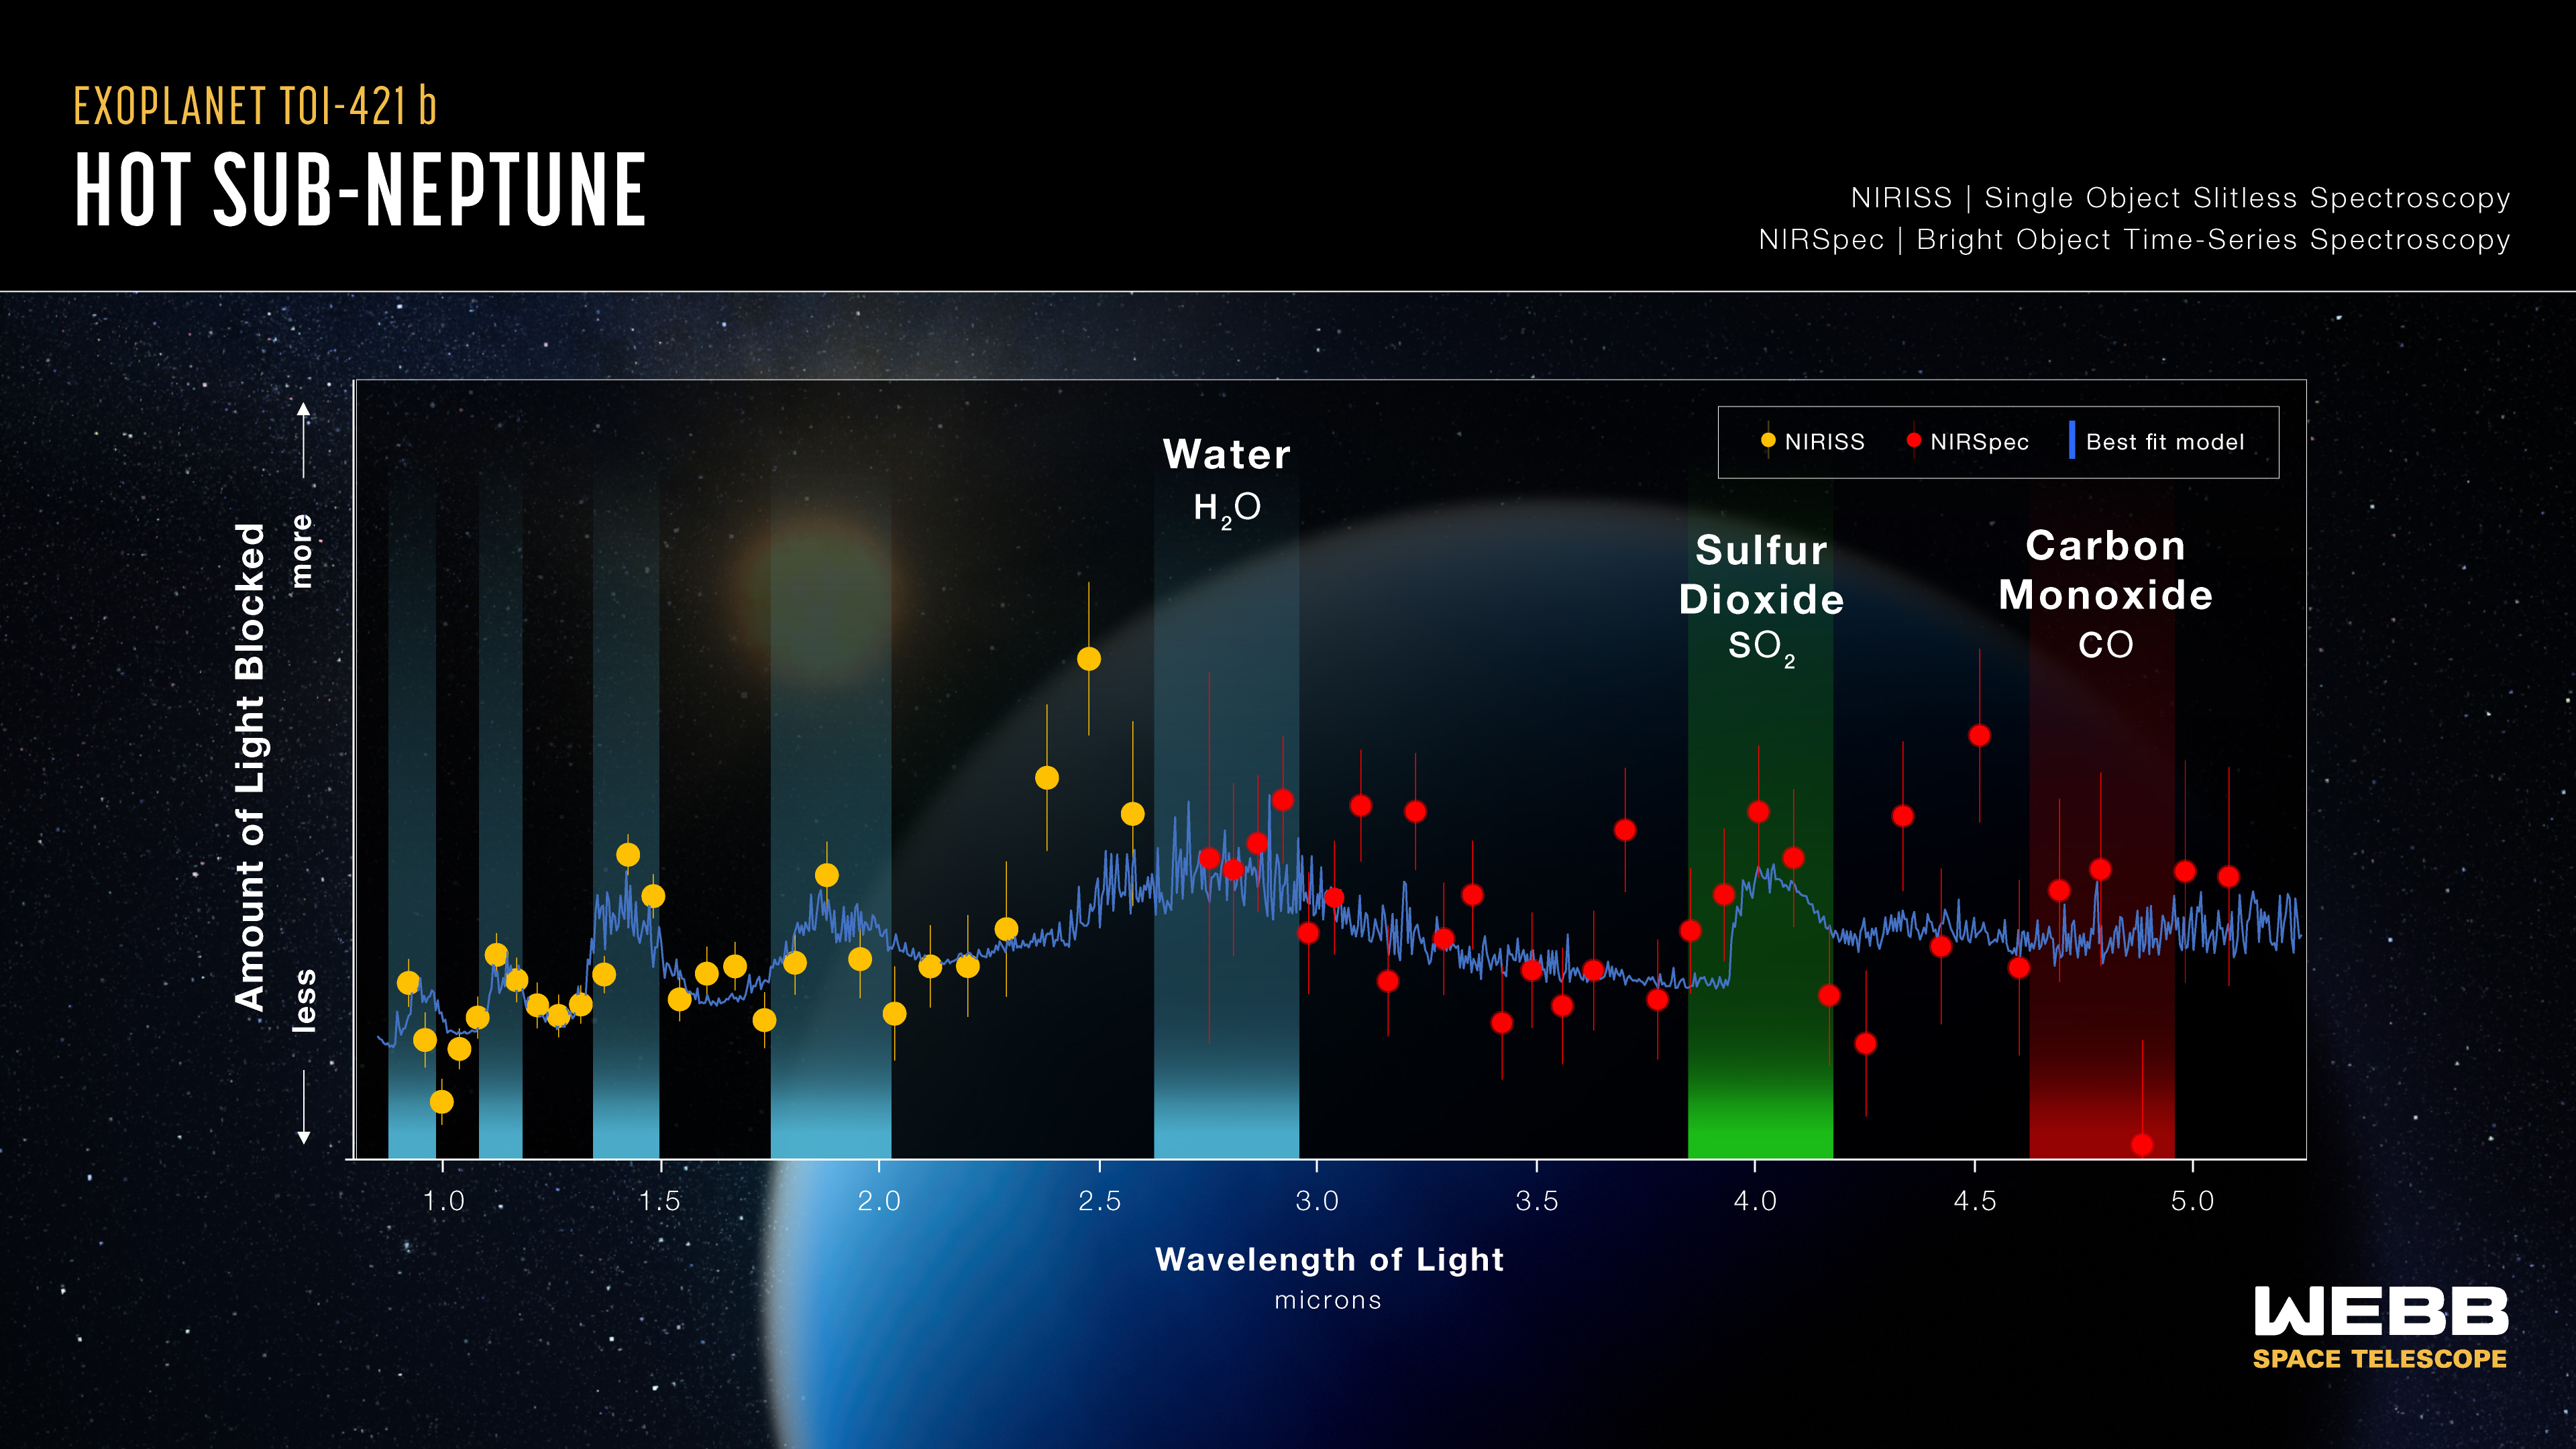

Hot sub-Neptune exoplanet TOI-421 b (NIRISS/NIRSpec transmission spectrum)

This is a transmission spectrum captured by the NASA/ESA/CSA James Webb Space Telescope that reveals the presence of water (H2O) and the possible presence of sulfur dioxide (SO2) and carbon monoxide (CO), but no signs of carbon dioxide (CO2) or methane (CH4), in the atmosphere of the hot sub-Neptune exoplanet TOI-421 b. The observations support the hypothesis that planets this hot (TOI-421 b is about 727°C) have clear atmospheres that are not obscured by clouds and haze.

Hot sub-Neptunes are larger than Earth, smaller than Neptune, and orbit closer to their stars than Mercury orbits the Sun. While not found in our own Solar System, sub-Neptunes may be the most common type of planet in our Milky Way galaxy.

This spectrum was made by measuring the decrease in apparent brightness of different wavelengths (colours) of starlight as the planet transited, or moved across the face of the star. During a transit, some wavelengths of starlight are transmitted through the planet’s atmosphere, while others are partially blocked. Because each molecule absorbs a unique combination of wavelengths, the transmission spectrum can be used to identify gases in the atmosphere.

This spectrum combines data captured in 2023 by Webb’s NIRISS (Near-Infrared Imager and Slitless Spectrograph) and NIRSpec (Near-Infrared Spectrograph).

Credit: NASA, ESA, CSA, J. Olmsted (STScI)